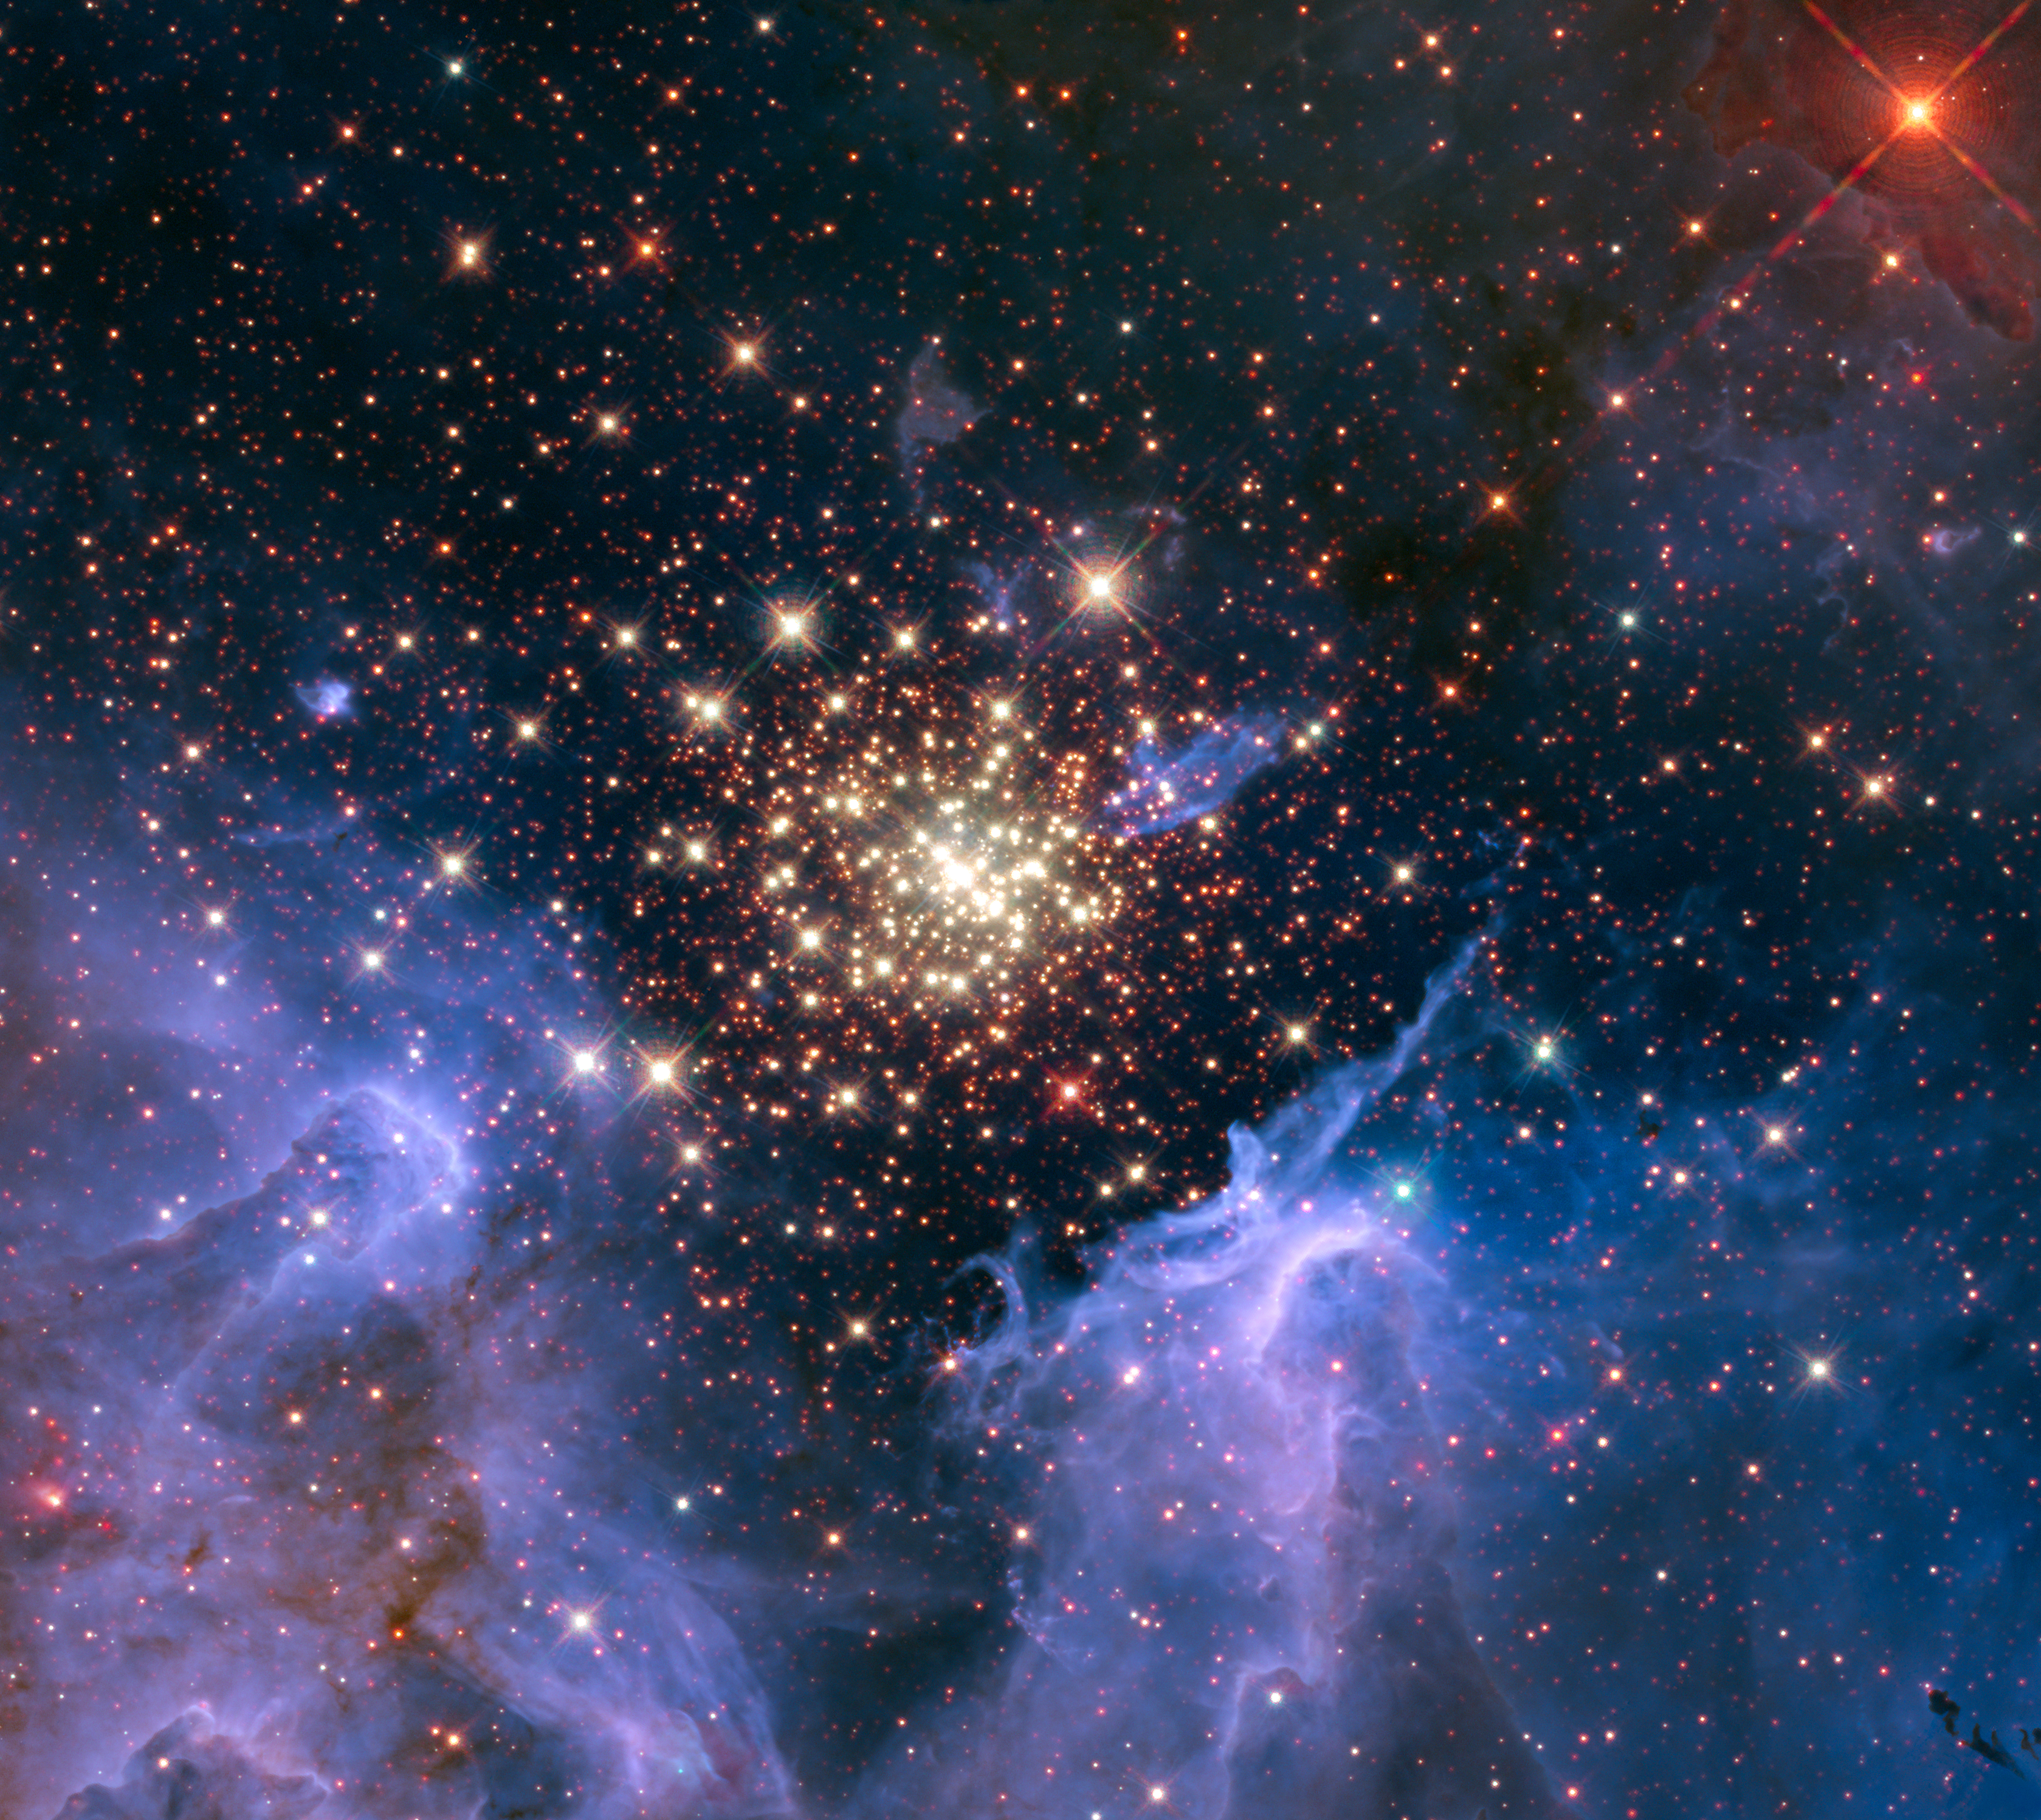

Starburst cluster shows celestial fireworks

Like a 4th of July fireworks display, a young, glittering collection of stars looks like an aerial burst. The cluster is surrounded by clouds of interstellar gas and dust—the raw material for new star formation. The nebula, located 20,000 light-years away in the constellation Carina, contains a central cluster of huge, hot stars, called NGC 3603.

This environment is not as peaceful as it looks. Ultraviolet radiation and violent stellar winds have blown out an enormous cavity in the gas and dust enveloping the cluster, providing an unobstructed view of the cluster.

Most of the stars in the cluster were born around the same time but differ in size, mass, temperature, and colour. The course of a star's life is determined by its mass, so a cluster of a given age will contain stars in various stages of their lives, giving an opportunity for detailed analyses of stellar life cycles. NGC 3603 also contains some of the most massive stars known. These huge stars live fast and die young, burning through their hydrogen fuel quickly and ultimately ending their lives in supernova explosions.

Star clusters like NGC 3603 provide important clues to understanding the origin of massive star formation in the early, distant Universe. Astronomers also use massive clusters to study distant starbursts that occur when galaxies collide, igniting a flurry of star formation. The proximity of NGC 3603 makes it an excellent lab for studying such distant and momentous events.

This Hubble Space Telescope image was captured in August 2009 and December 2009 with the Wide Field Camera 3 in both visible and infrared light, which trace the glow of sulfur, hydrogen, and iron.

Credit: NASA, ESA, R. O'Connell (University of Virginia), F. Paresce (National Institute for Astrophysics, Bologna, Italy), E. Young (Universities Space Research Association/Ames Research Center), the WFC3 Science Oversight Committee, and the Hubble Heritage Team (STScI/AURA)